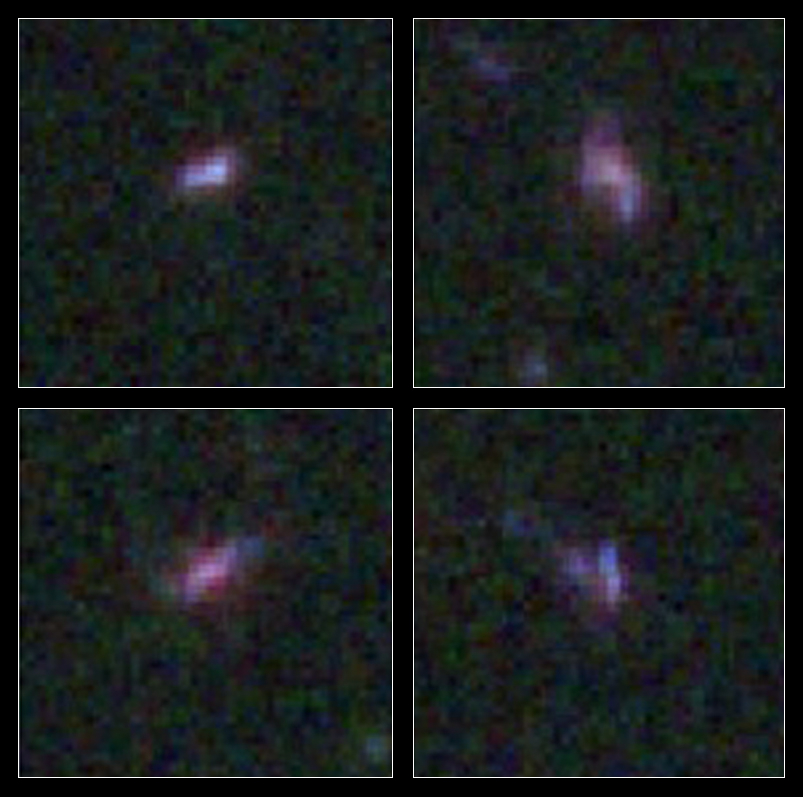

Even low-mass galaxies can harbour supermassive black holes

This is a montage of four small, young galaxies taken from a Hubble Space Telescope Wide Field Camera 3 slitless grism sample of 28 low-mass galaxies located 10 billion light-years away in the Hubble Ultra Deep Field region of the Cosmic Assembly Near-infrared Deep Extragalactic Legacy Survey (CANDELS). These colour images were generated from exposures in six different Hubble filters and provide detailed information about the different wavelengths of light coming from the galaxies. Astronomers say this new study gives them a view of galaxies as they appeared when the Universe was less than a quarter of its current age and shows that central black holes formed at an early stage in galaxy evolution.

Credit: NASA, ESA, A. Koekemoer (STScI), J. Trump and S. Faber (University of California, Santa Cruz), and the CANDELS Team